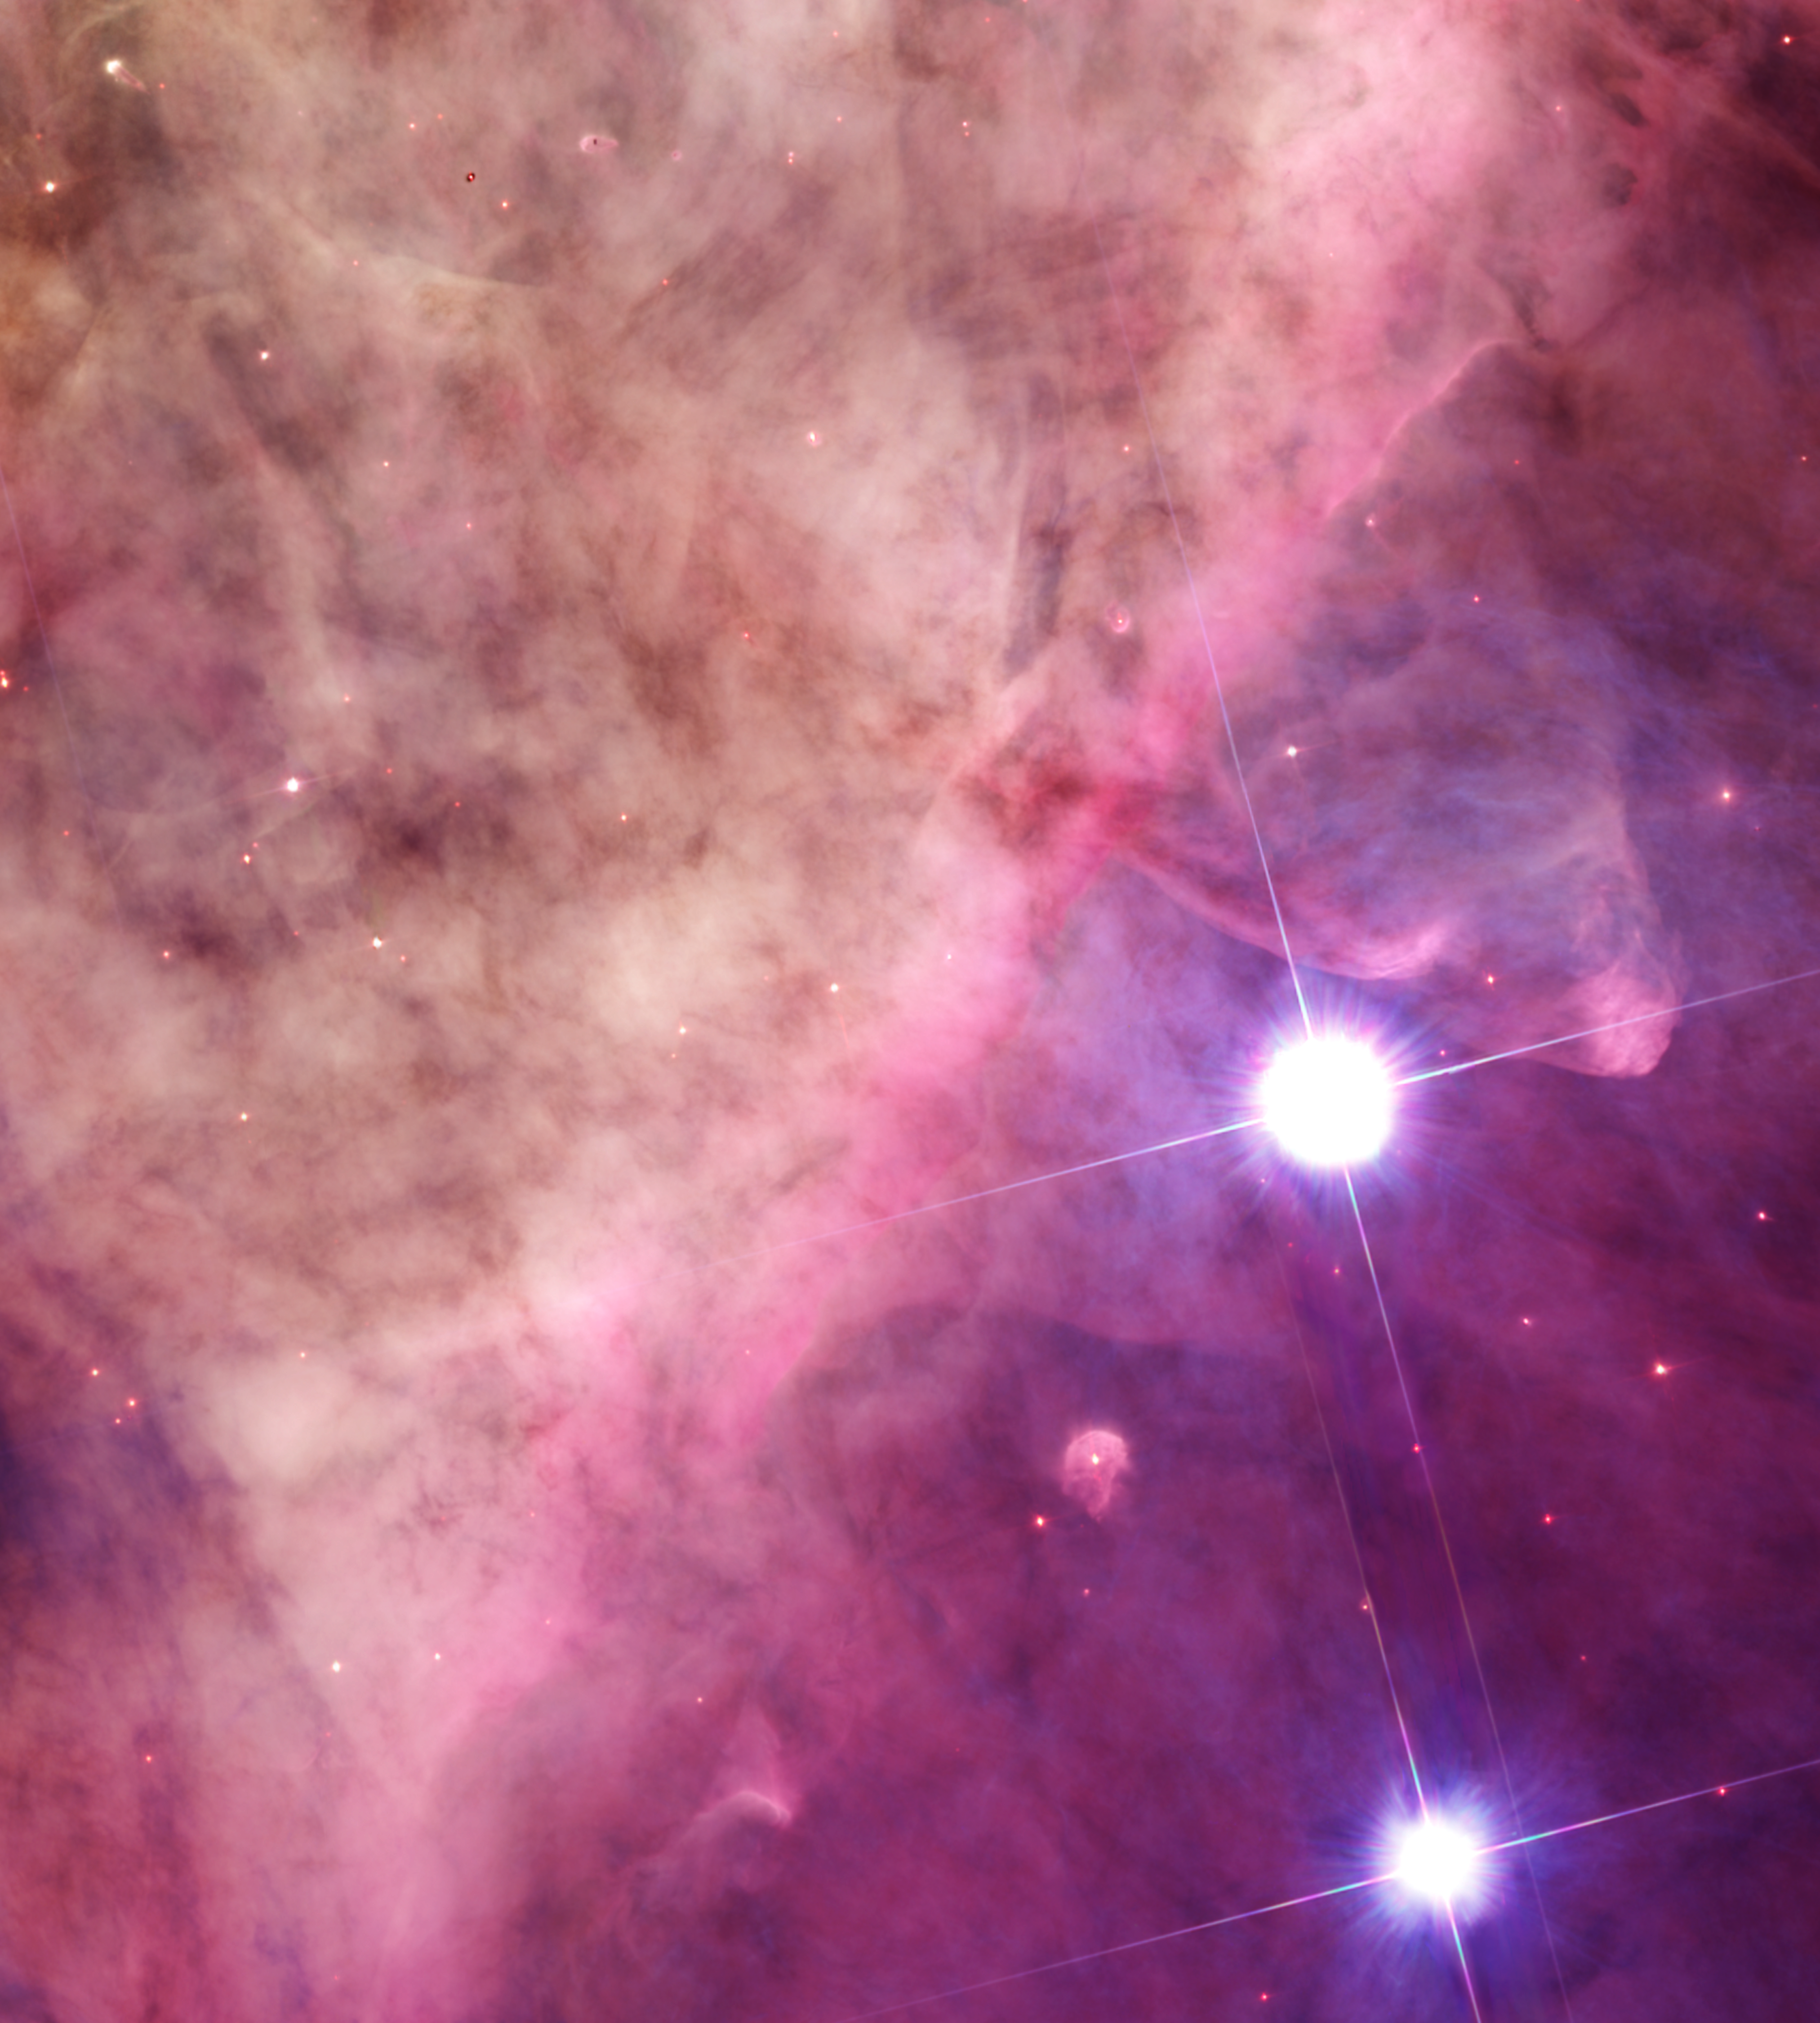

The Orion Bar region (Hubble image)

This image is a section of a larger NASA/ESA Hubble Space Telescope mosaic of the entire Orion Nebula, released in 2006. At the centre of the nebula lies a group of four hot, massive stars known as the Trapezium Cluster. In this image, the cluster lies just out of view, off the top-left corner, illuminating the gas visible here. The two large stars in the image are part of another cluster, named θ² Orionis. A number of proplyds are visible among the clouds of the nebula.

This Hubble image has been cropped and aligned so that it matches the same area as viewed by Webb with NIRCam.

Credit: ESA/Hubble & NASA, M. Robberto (Space Telescope Science Institute/ESA) and the Hubble Space Telescope Orion Treasury Project Team